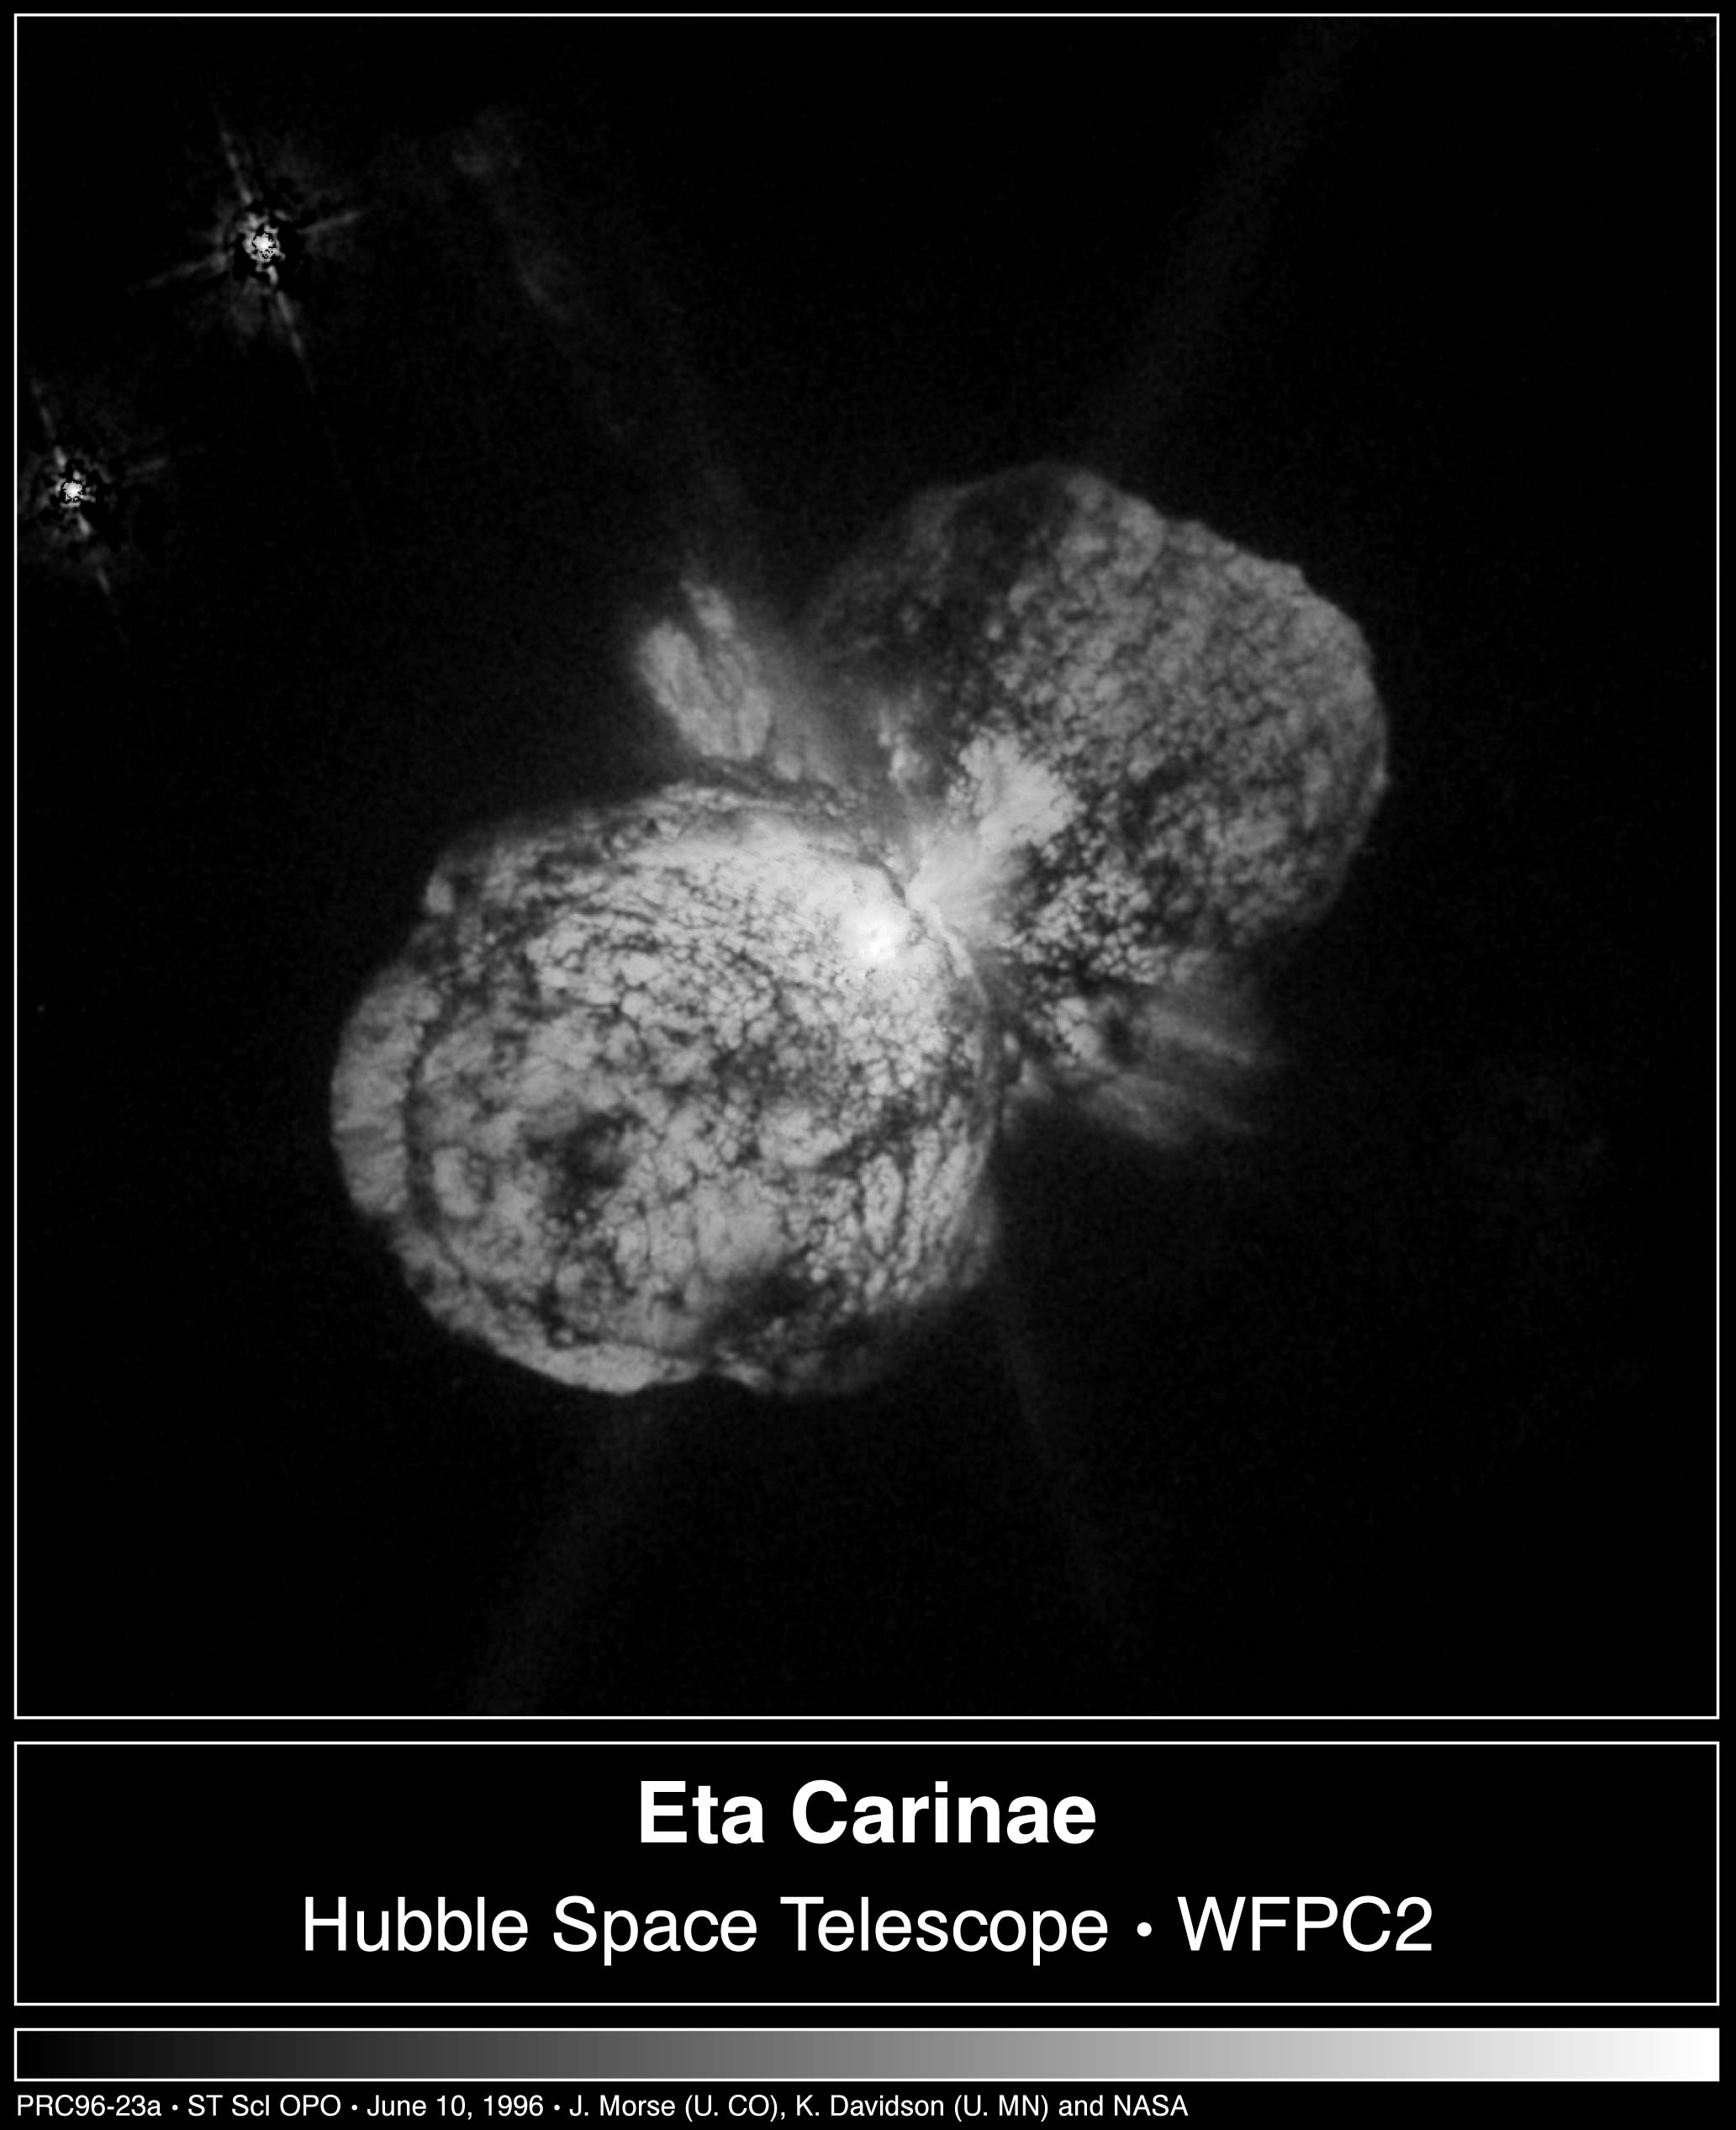

The Expansion of Eta Carinae Debris

The furious expansion of a huge, billowing pair of gas and dust clouds are captured in this Hubble Space Telescope comparison image of the supermassive star Eta Carinae.

To create the picture, astronomers aligned and subtracted two images of Eta Carinae taken 17 months apart (April 1994, September 1995). Black represents where the material was located in the older image, and white represents the more recent location.

Credit: Jon Morse (University of Colorado), Kris Davidson (University of Minnesota), and NASA/ESA